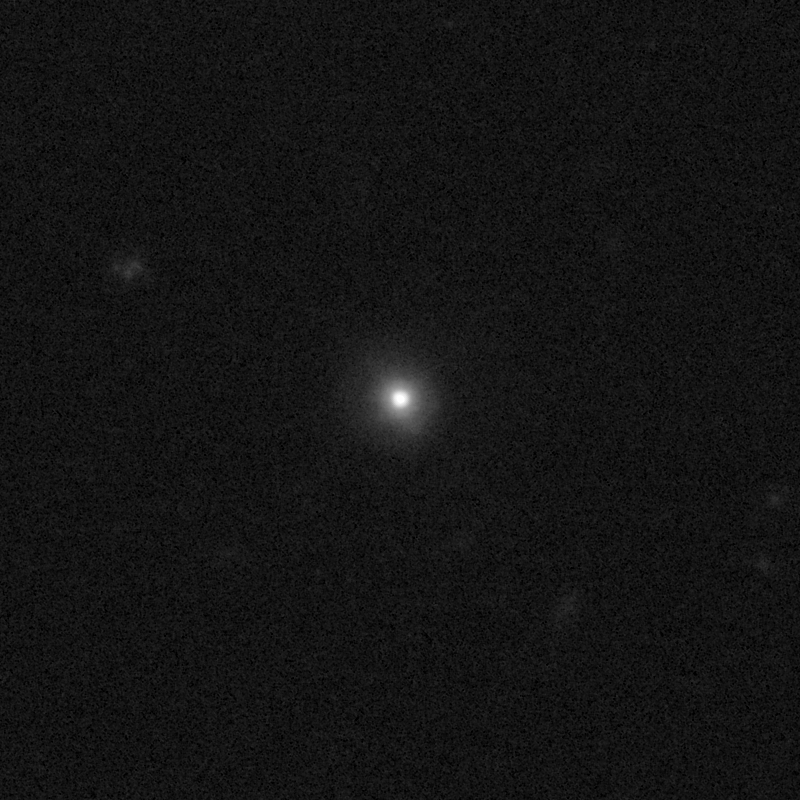

Outflows from merging galaxy J1359+5137

This NASA/ESA Hubble Space Telescope image of the galaxy J1359+5137 shows it is undergoing a firestorm of star birth, as shown by its bright white cores.

This star-making frenzy was ignited by mergers with other galaxies. The odd shape of the galaxy is telltale evidence of a close encounters.

The new Hubble Wide Field Camera 3 observations of this and eleven other galaxies undergoing the same process suggest that energy from the star-birthing frenzies created powerful winds that are blowing out the gas, meaning it is not available to form future generations of stars.

This activity occurred when the Universe was half its current age of 13.7 billion years. The gas-poor galaxies may eventually become so-called red and dead galaxies, composed only of aging stars.

This Hubble false-colour image was processed to bring out important details in the galaxy. The images were taken in 2010.

Credit: NASA, ESA, and P. Sell (Texas Tech University)